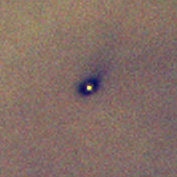

Protoplanetary Discs in the Orion Nebula

Hubble Space Telescope discovered four protoplanetary disks around young stars in the Orion nebula, located 1, 500 light-years away. This is one of them. Gas and dust disks, long suspected by astronomers to be an early stage of planetary formation, can be directly seen in visible light by Hubble.

Credit: Mark McCaughrean (Max-Planck-Institute for Astronomy), C. Robert O'Dell (Rice University), and NASA/ESA